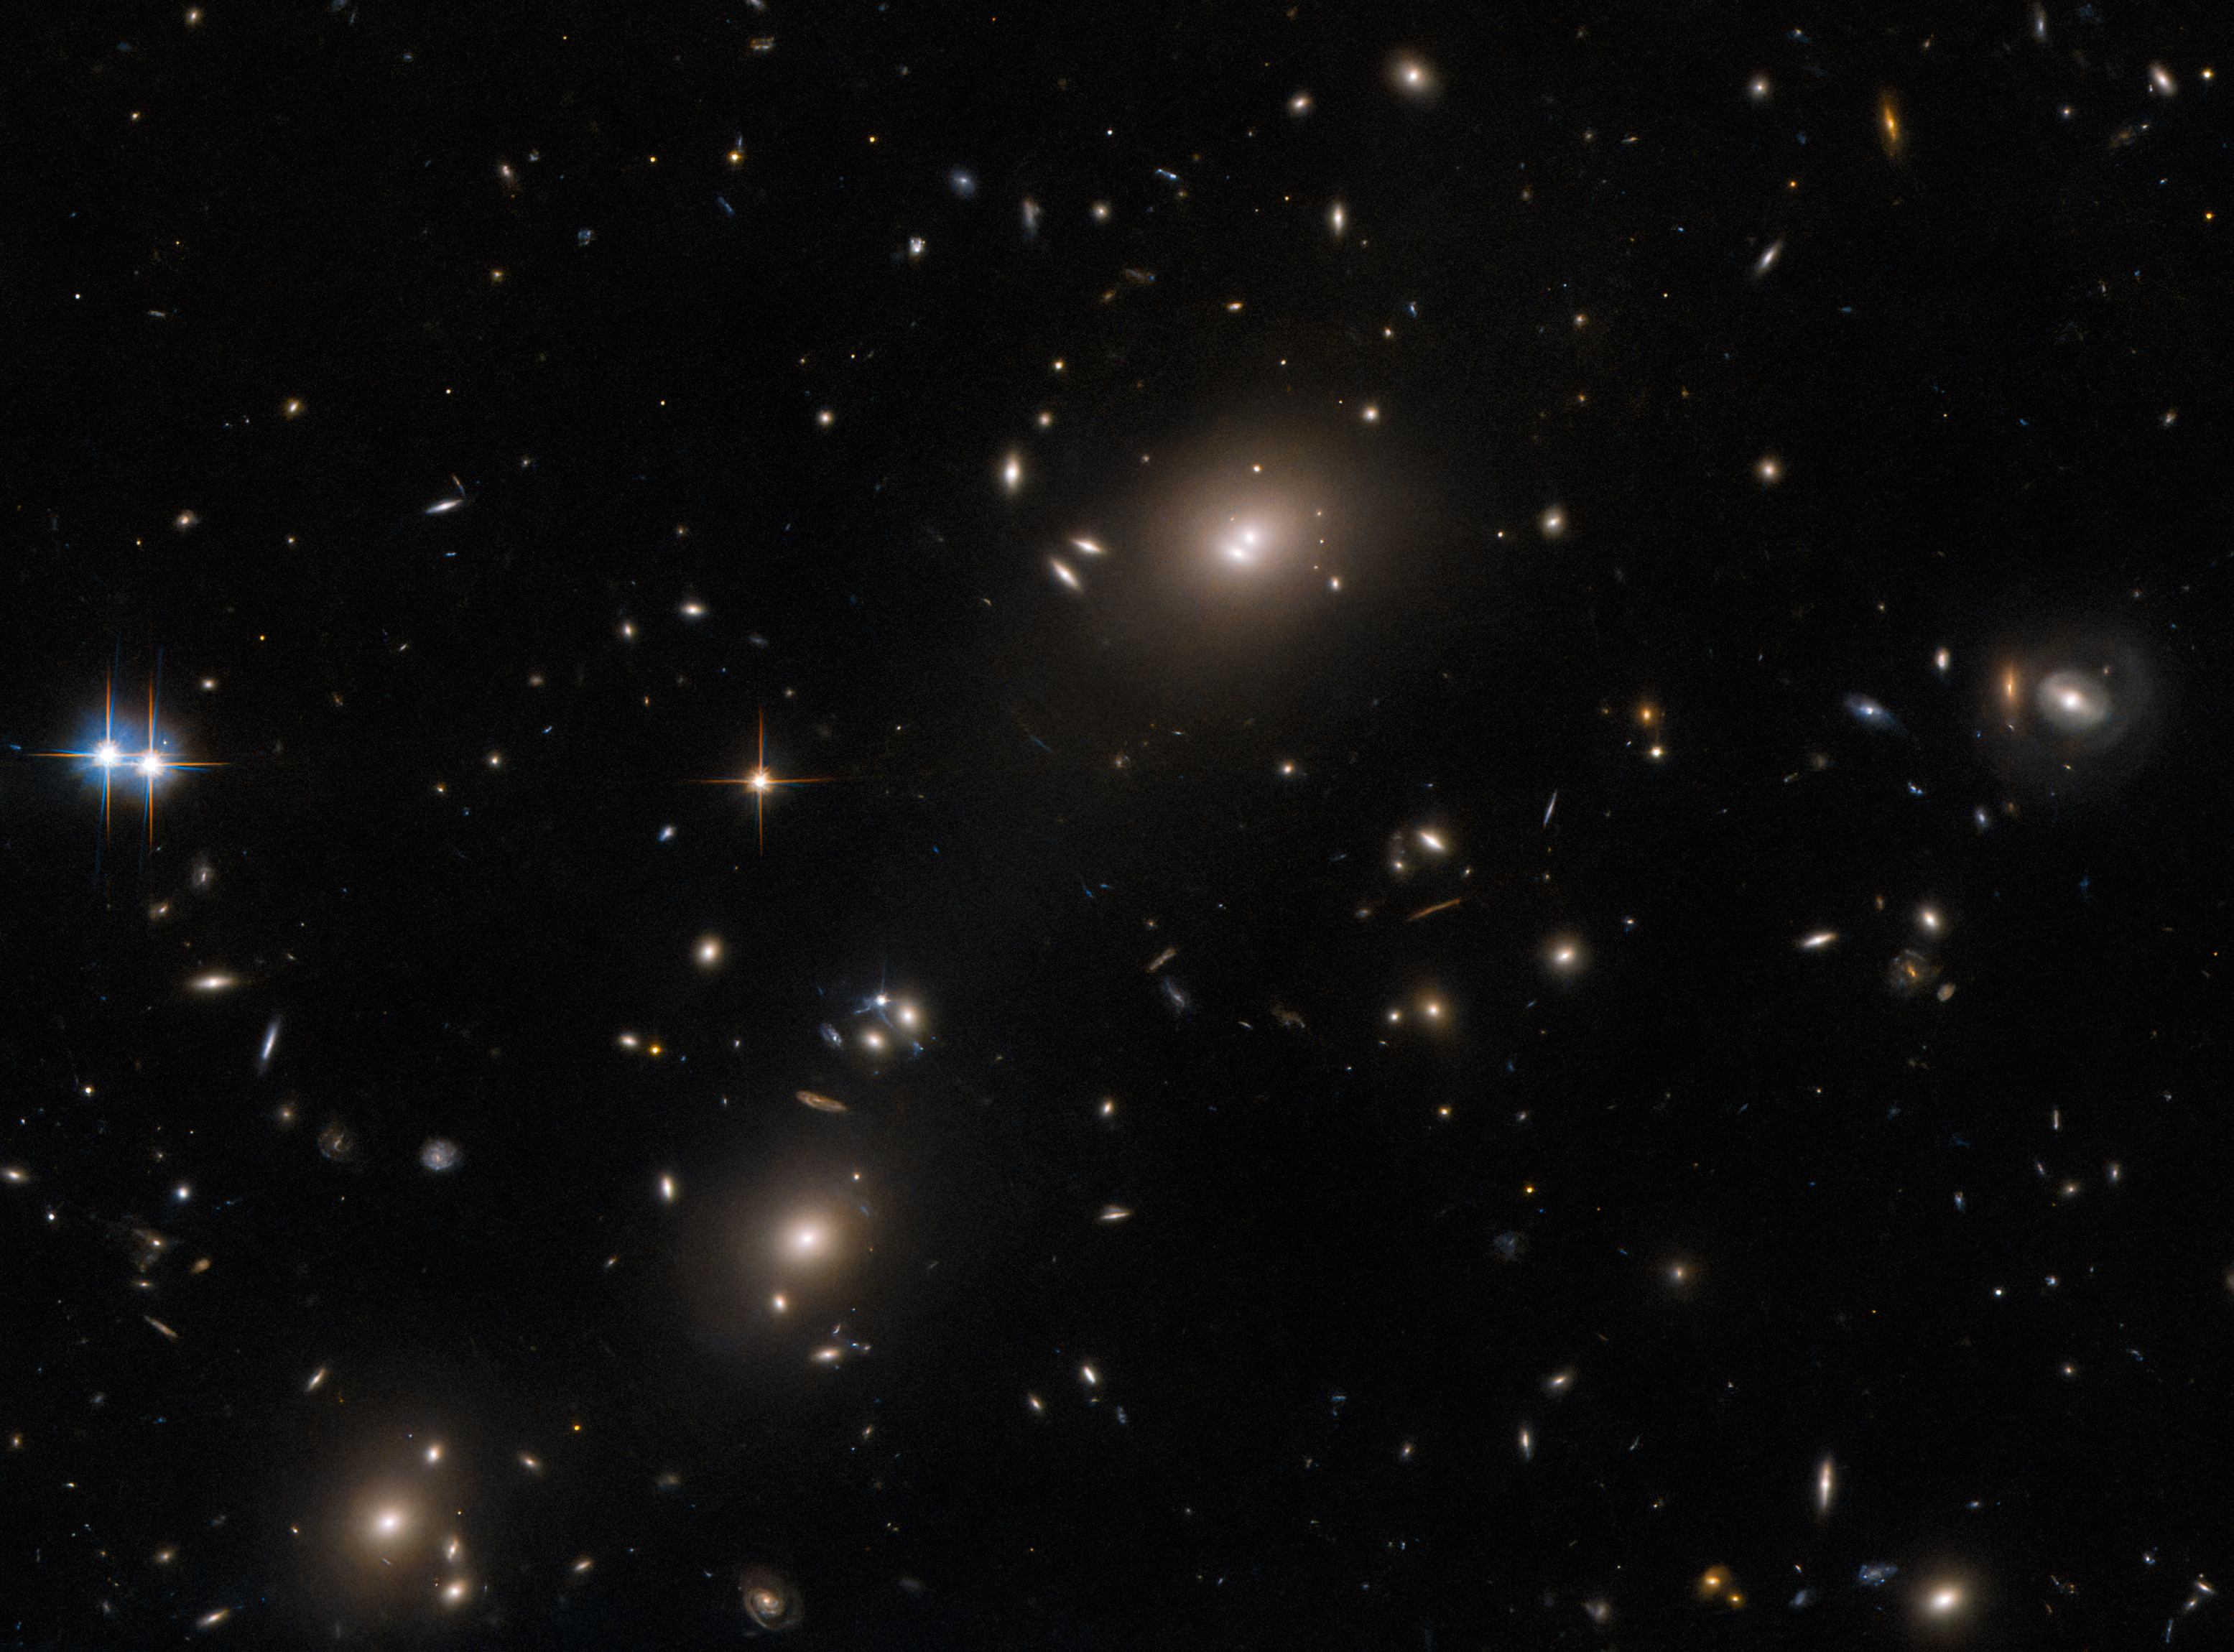

The cluster that almost got away

A menagerie of interesting astronomical finds fill this image from the NASA/ESA Hubble Space Telescope. As well as several large elliptical galaxies, a ring-shaped galaxy is lurking on the right of this image. A pair of bright stars are also visible at the left of this image, notable for their colourful criss-crossing diffraction spikes. This collection of astronomical curiosities is the galaxy cluster ACO S520 in the constellation Pictor, which was captured by Hubble’s Advanced Camera for Surveys.

This is one of a series of Hubble observations searching for massive, luminous galaxy clusters that had not been captured by earlier surveys. Appropriately, the proposal for observing time was named "They almost got away"! Astronomers took advantage of occasional gaps in Hubble's busy schedule to capture images of these barely-explored galaxy clusters, revealing a wealth of interesting targets for further study with Hubble and the NASA/ESA/CSA James Webb Space Telescope.

Galaxy clusters are among the largest known objects in the Universe, and studying these objects can provide insights into the distribution of dark matter, which is responsible for most of the mass of a galaxy cluster. The vast masses of galaxy clusters is what causes many of them to act as gravitational lenses which distort and magnify light from even more distant objects. This can allow astronomers to use galaxy clusters as a kind of natural gravitational telescope to reveal distant objects that would usually be too faint to resolve — even for the crystal-clear vision of Hubble.

Credit: ESA/Hubble & NASA, H. Ebeling